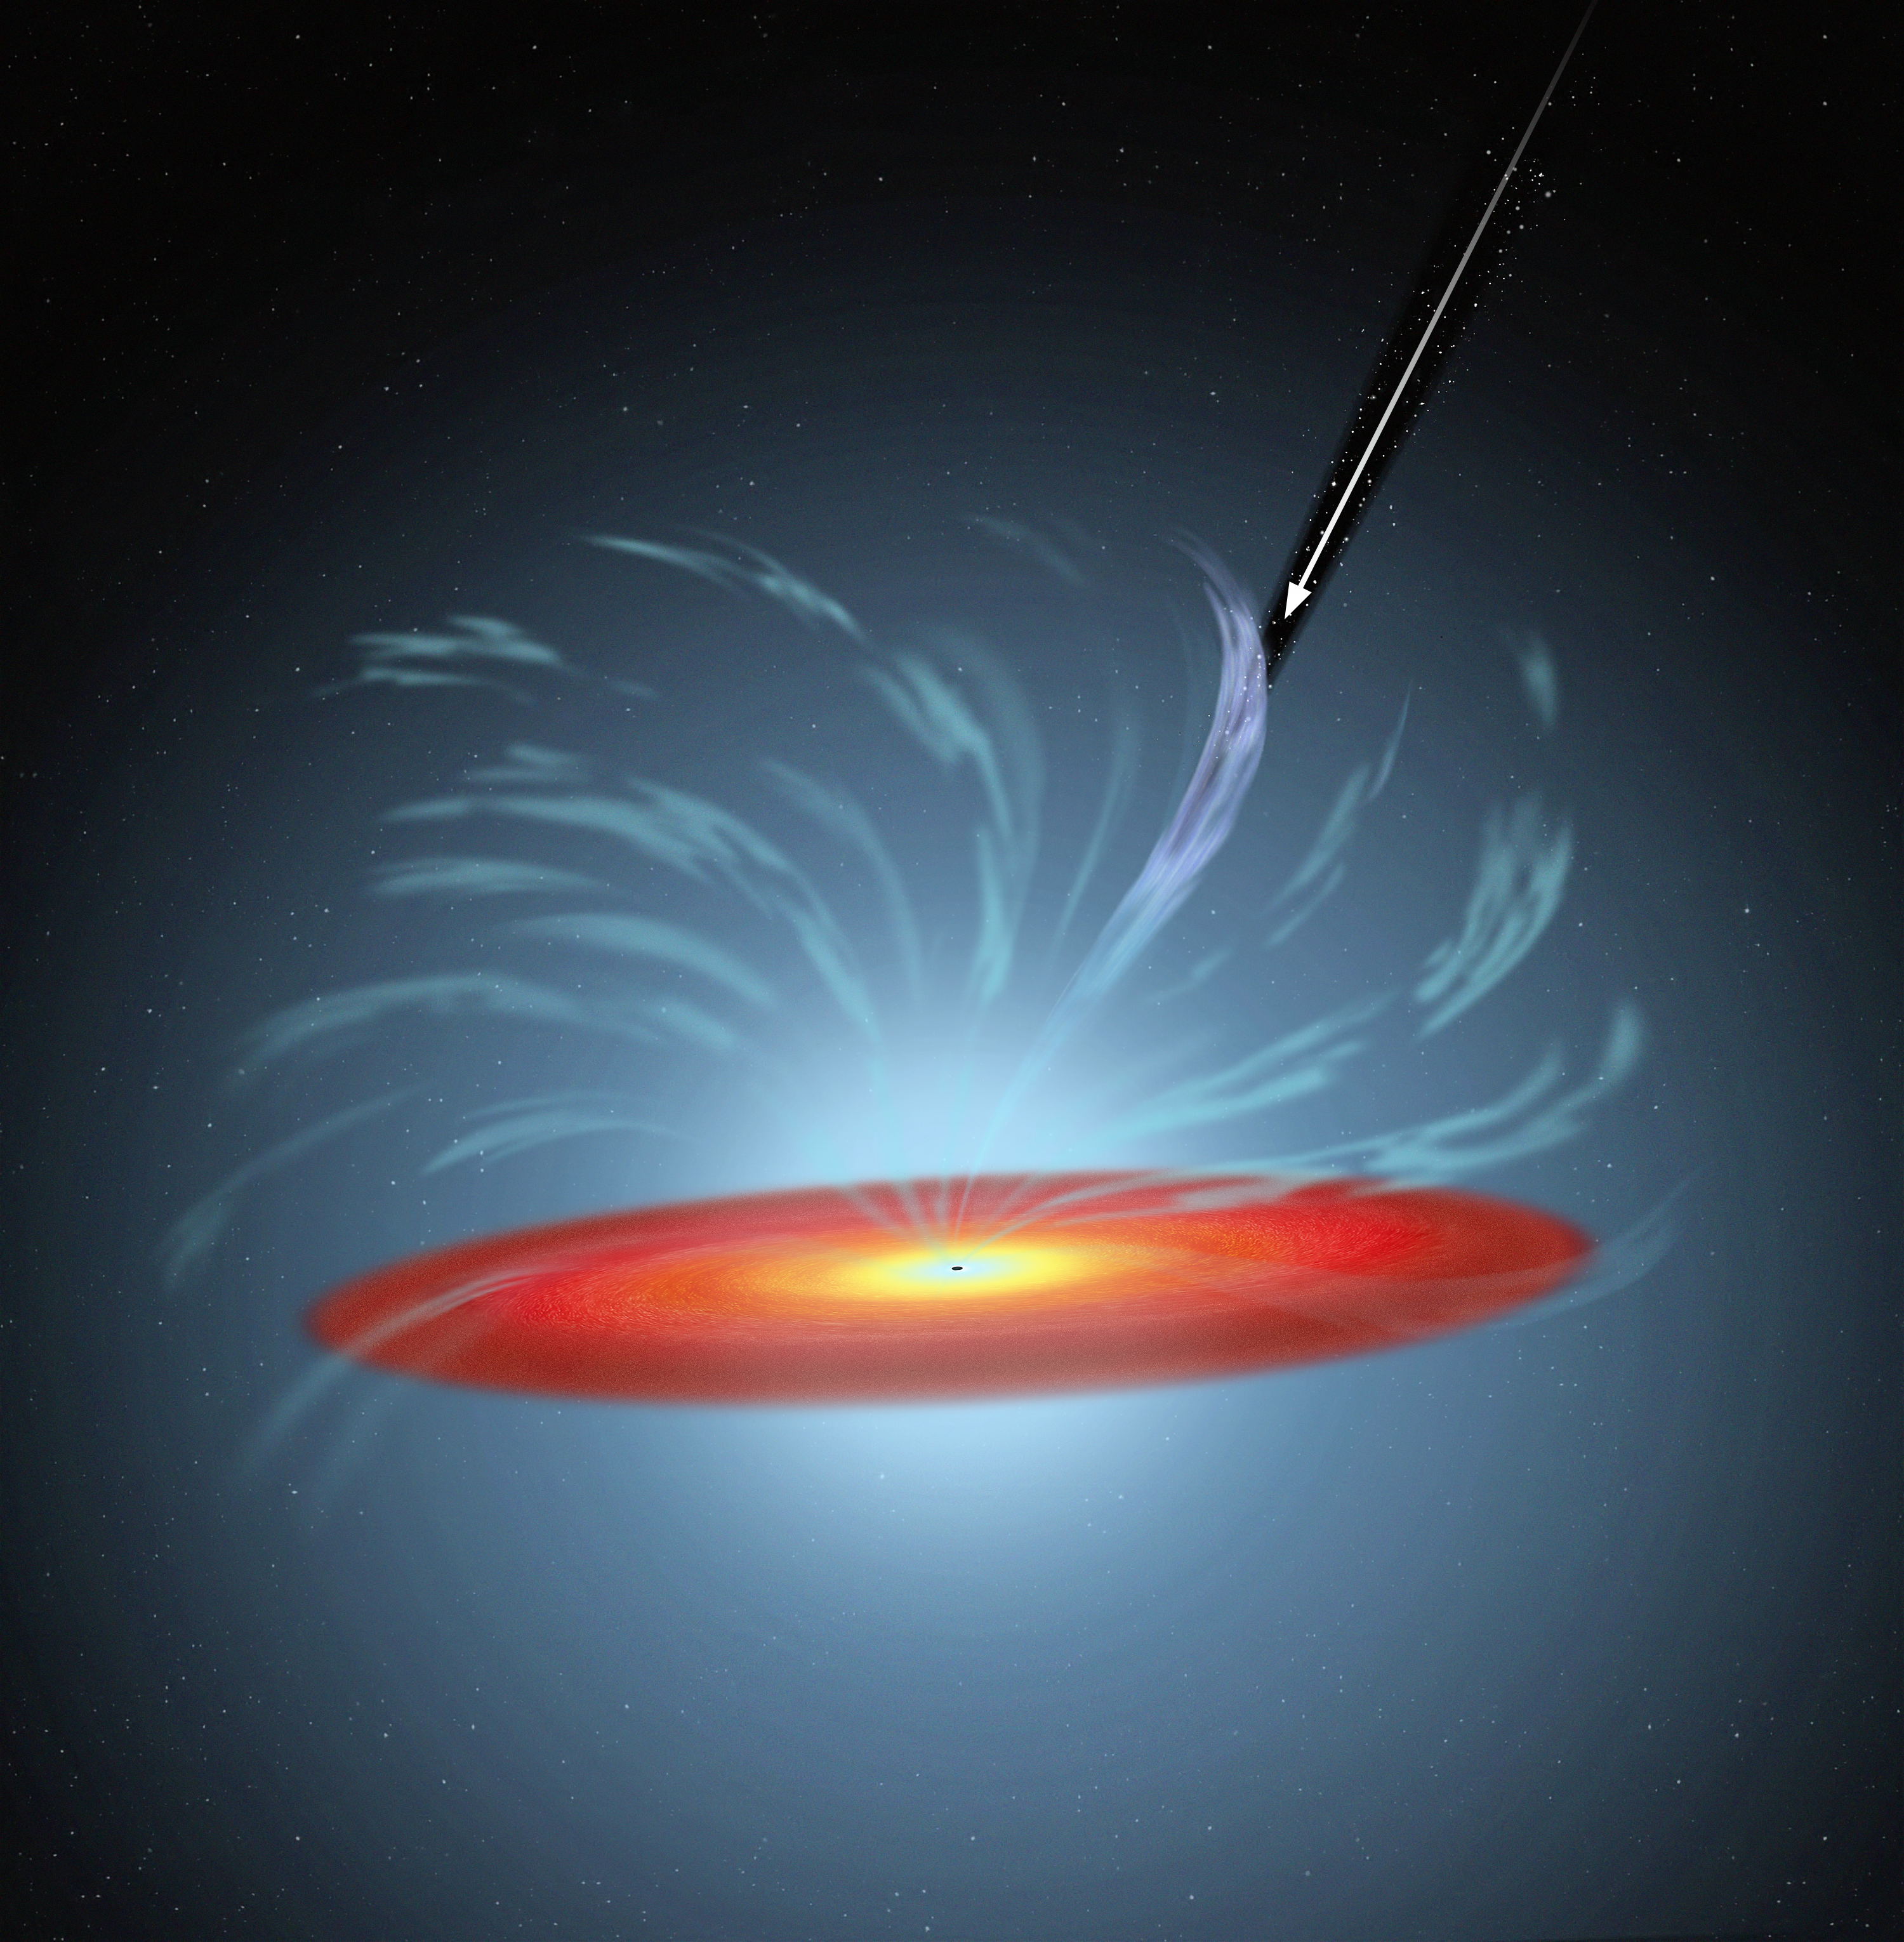

Artist’s impression of gas filament eclipsing a black hole

This artist’s impression illustrates the finding, by an international team of astronomers, of a clumpy gas stream flowing quickly outward from the supermassive black hole at the centre of active galaxy NGC 5548.

The gas filament is blocking 90 percent of the X-rays emitted by the supermassive black hole at the centre of the galaxy. This activity may provide new insights into the interaction between supermassive black holes and their host galaxies.

The arrow in the image shows the NASA/ESA Hubble Space Telescope’s line of sight.

Credit: NASA, ESA, and A. Feild (STScI)